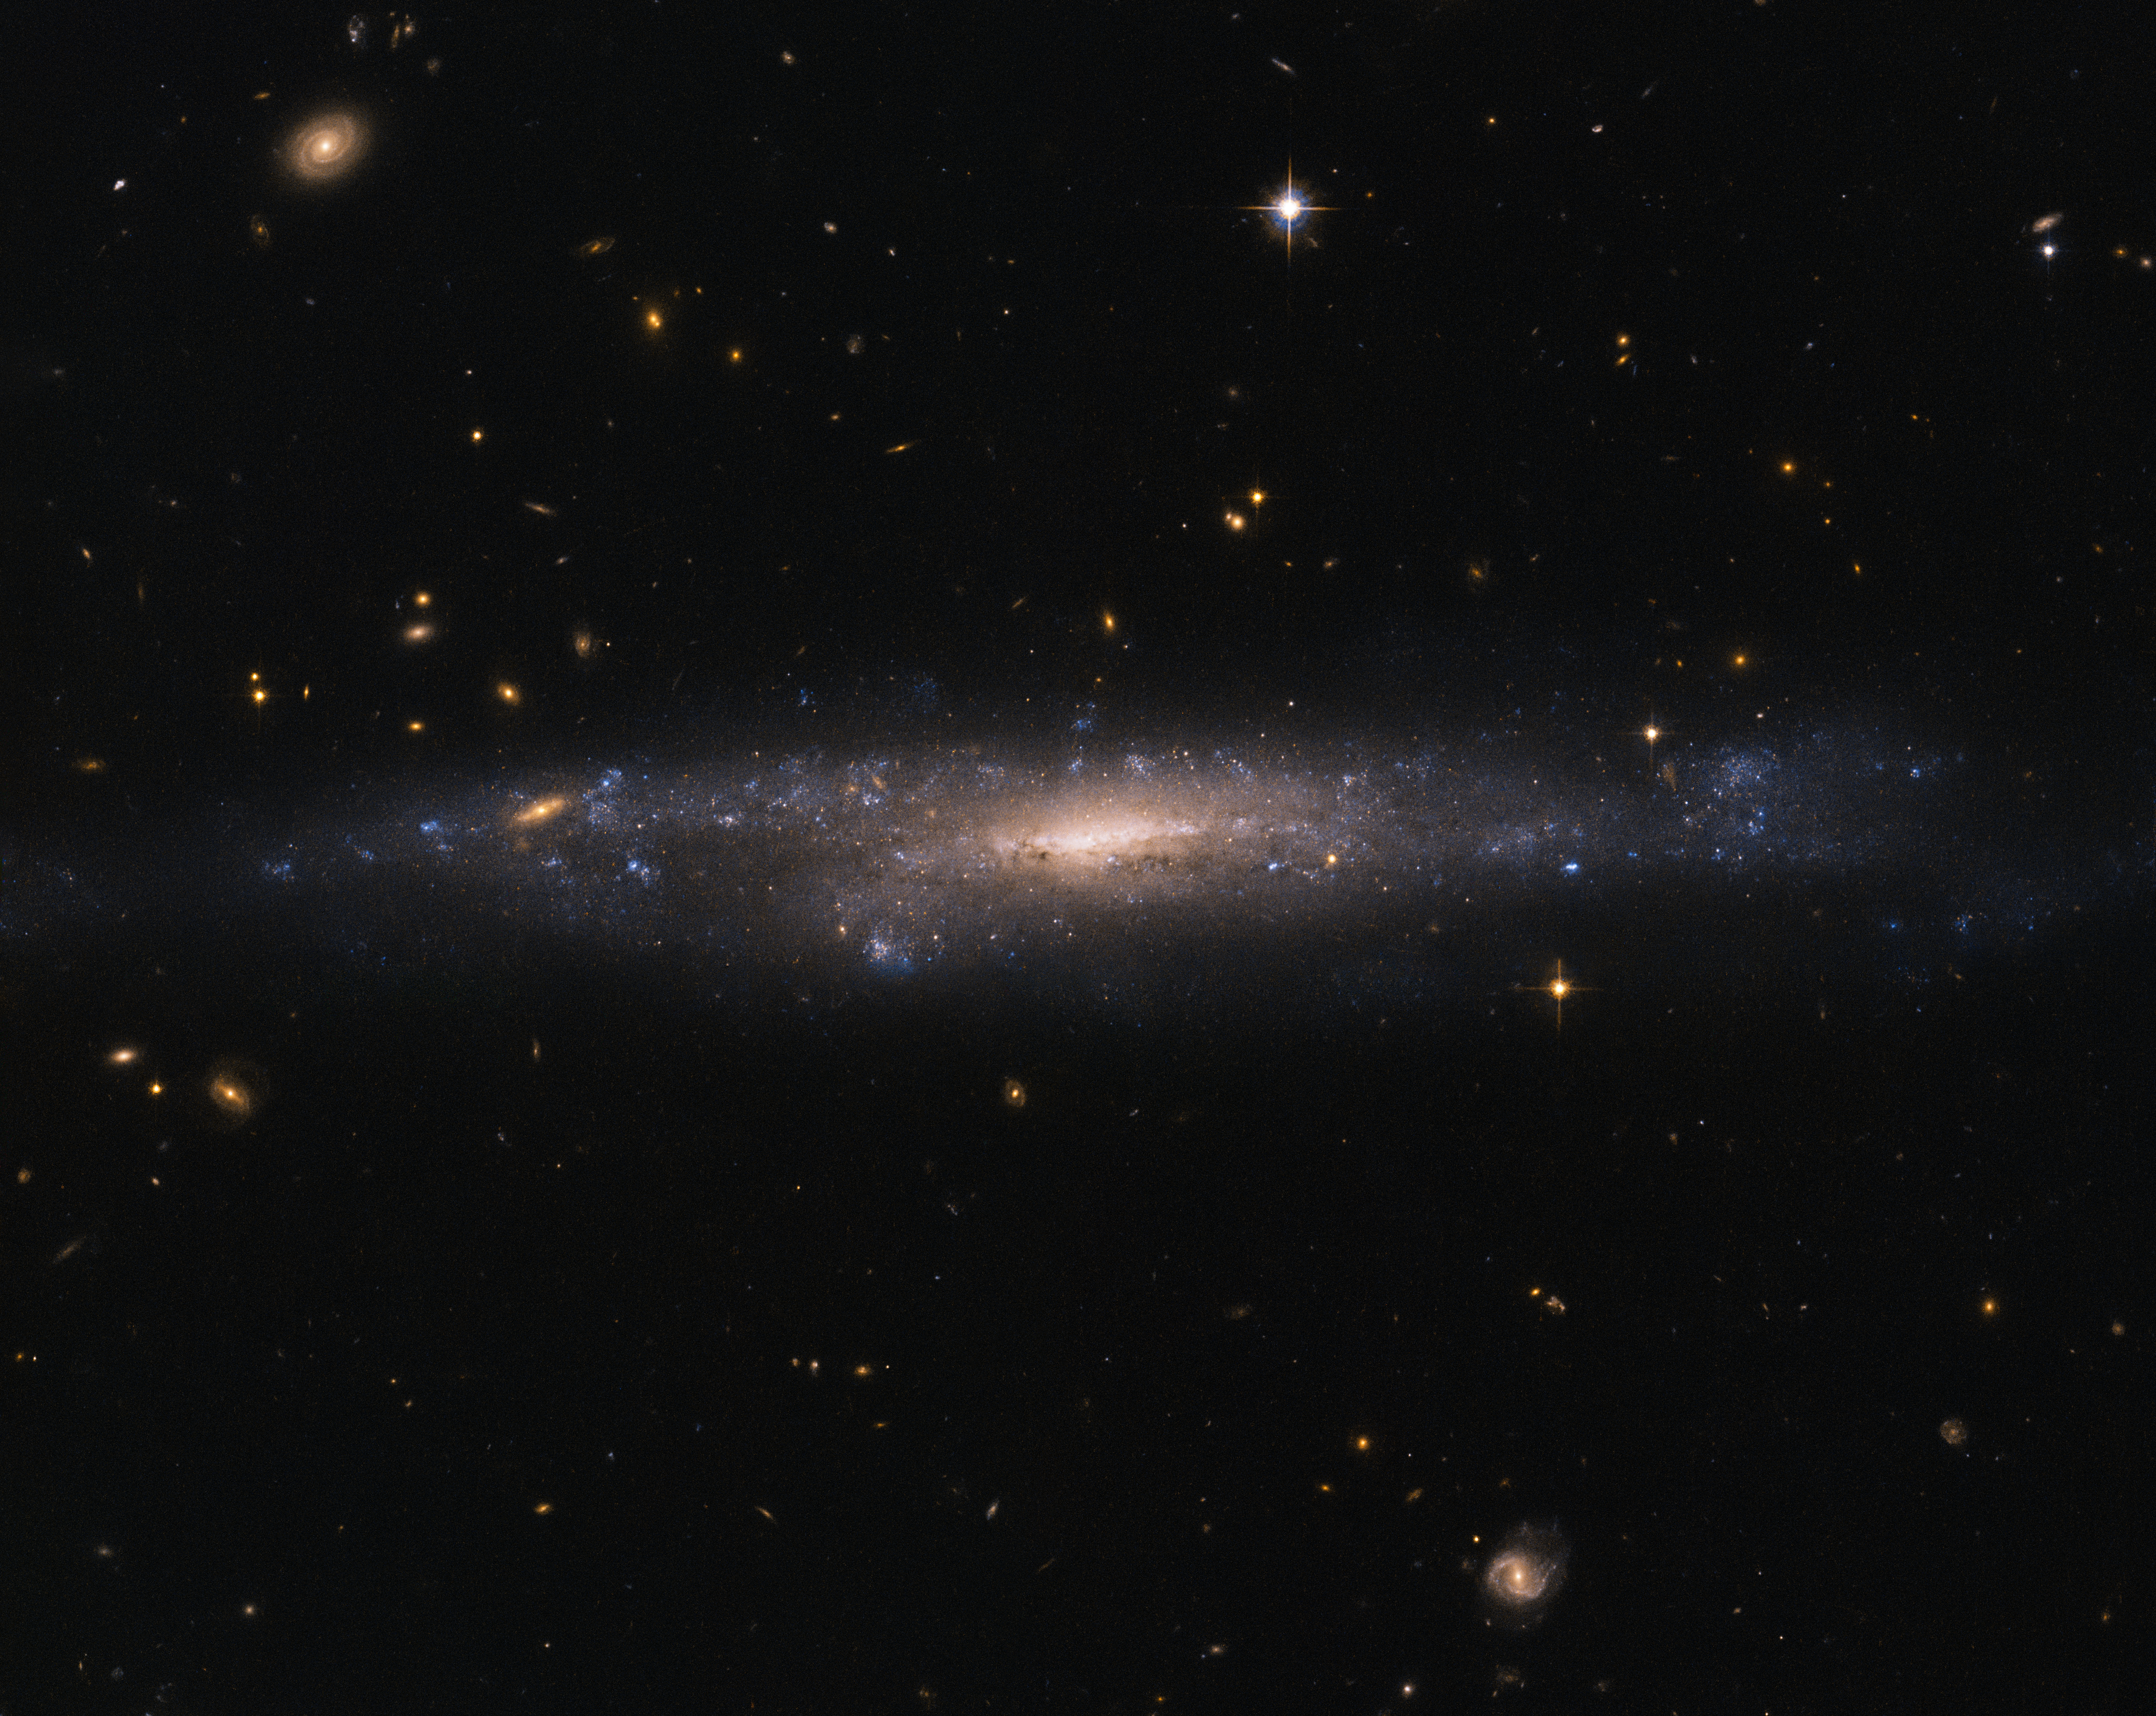

Hiding in the night sky

This striking NASA/ESA Hubble Space Telescope image captures the galaxy UGC 477, located just over 110 million light-years away in the constellation of Pisces (The Fish).

UGC 477 is a low surface brightness (LSB) galaxy. First proposed in 1976 by Mike Disney, the existence of LSB galaxies was confirmed only in 1986 with the discovery of Malin 1. LSB galaxies like UGC 477 are more diffusely distributed than galaxies such as Andromeda and the Milky Way. With surface brightnesses up to 250 times fainter than the night sky, these galaxies can be incredibly difficult to detect.

Most of the matter present in LSB galaxies is in the form of hydrogen gas, rather than stars. Unlike the bulges of normal spiral galaxies, the centres of LSB galaxies do not contain large numbers of stars. Astronomers suspect that this is because LSB galaxies are mainly found in regions devoid of other galaxies, and have therefore experienced fewer galactic interactions and mergers capable of triggering high rates of star formation.

LSB galaxies such as UGC 477 instead appear to be dominated by dark matter, making them excellent objects to study to further our understanding of this elusive substance. However, due to an underrepresentation in galactic surveys — caused by their characteristic low brightness — their importance has only been realised relatively recently.

Credit: ESA/Hubble & NASA Acknowledgement: Judy Schmidt (Geckzilla)